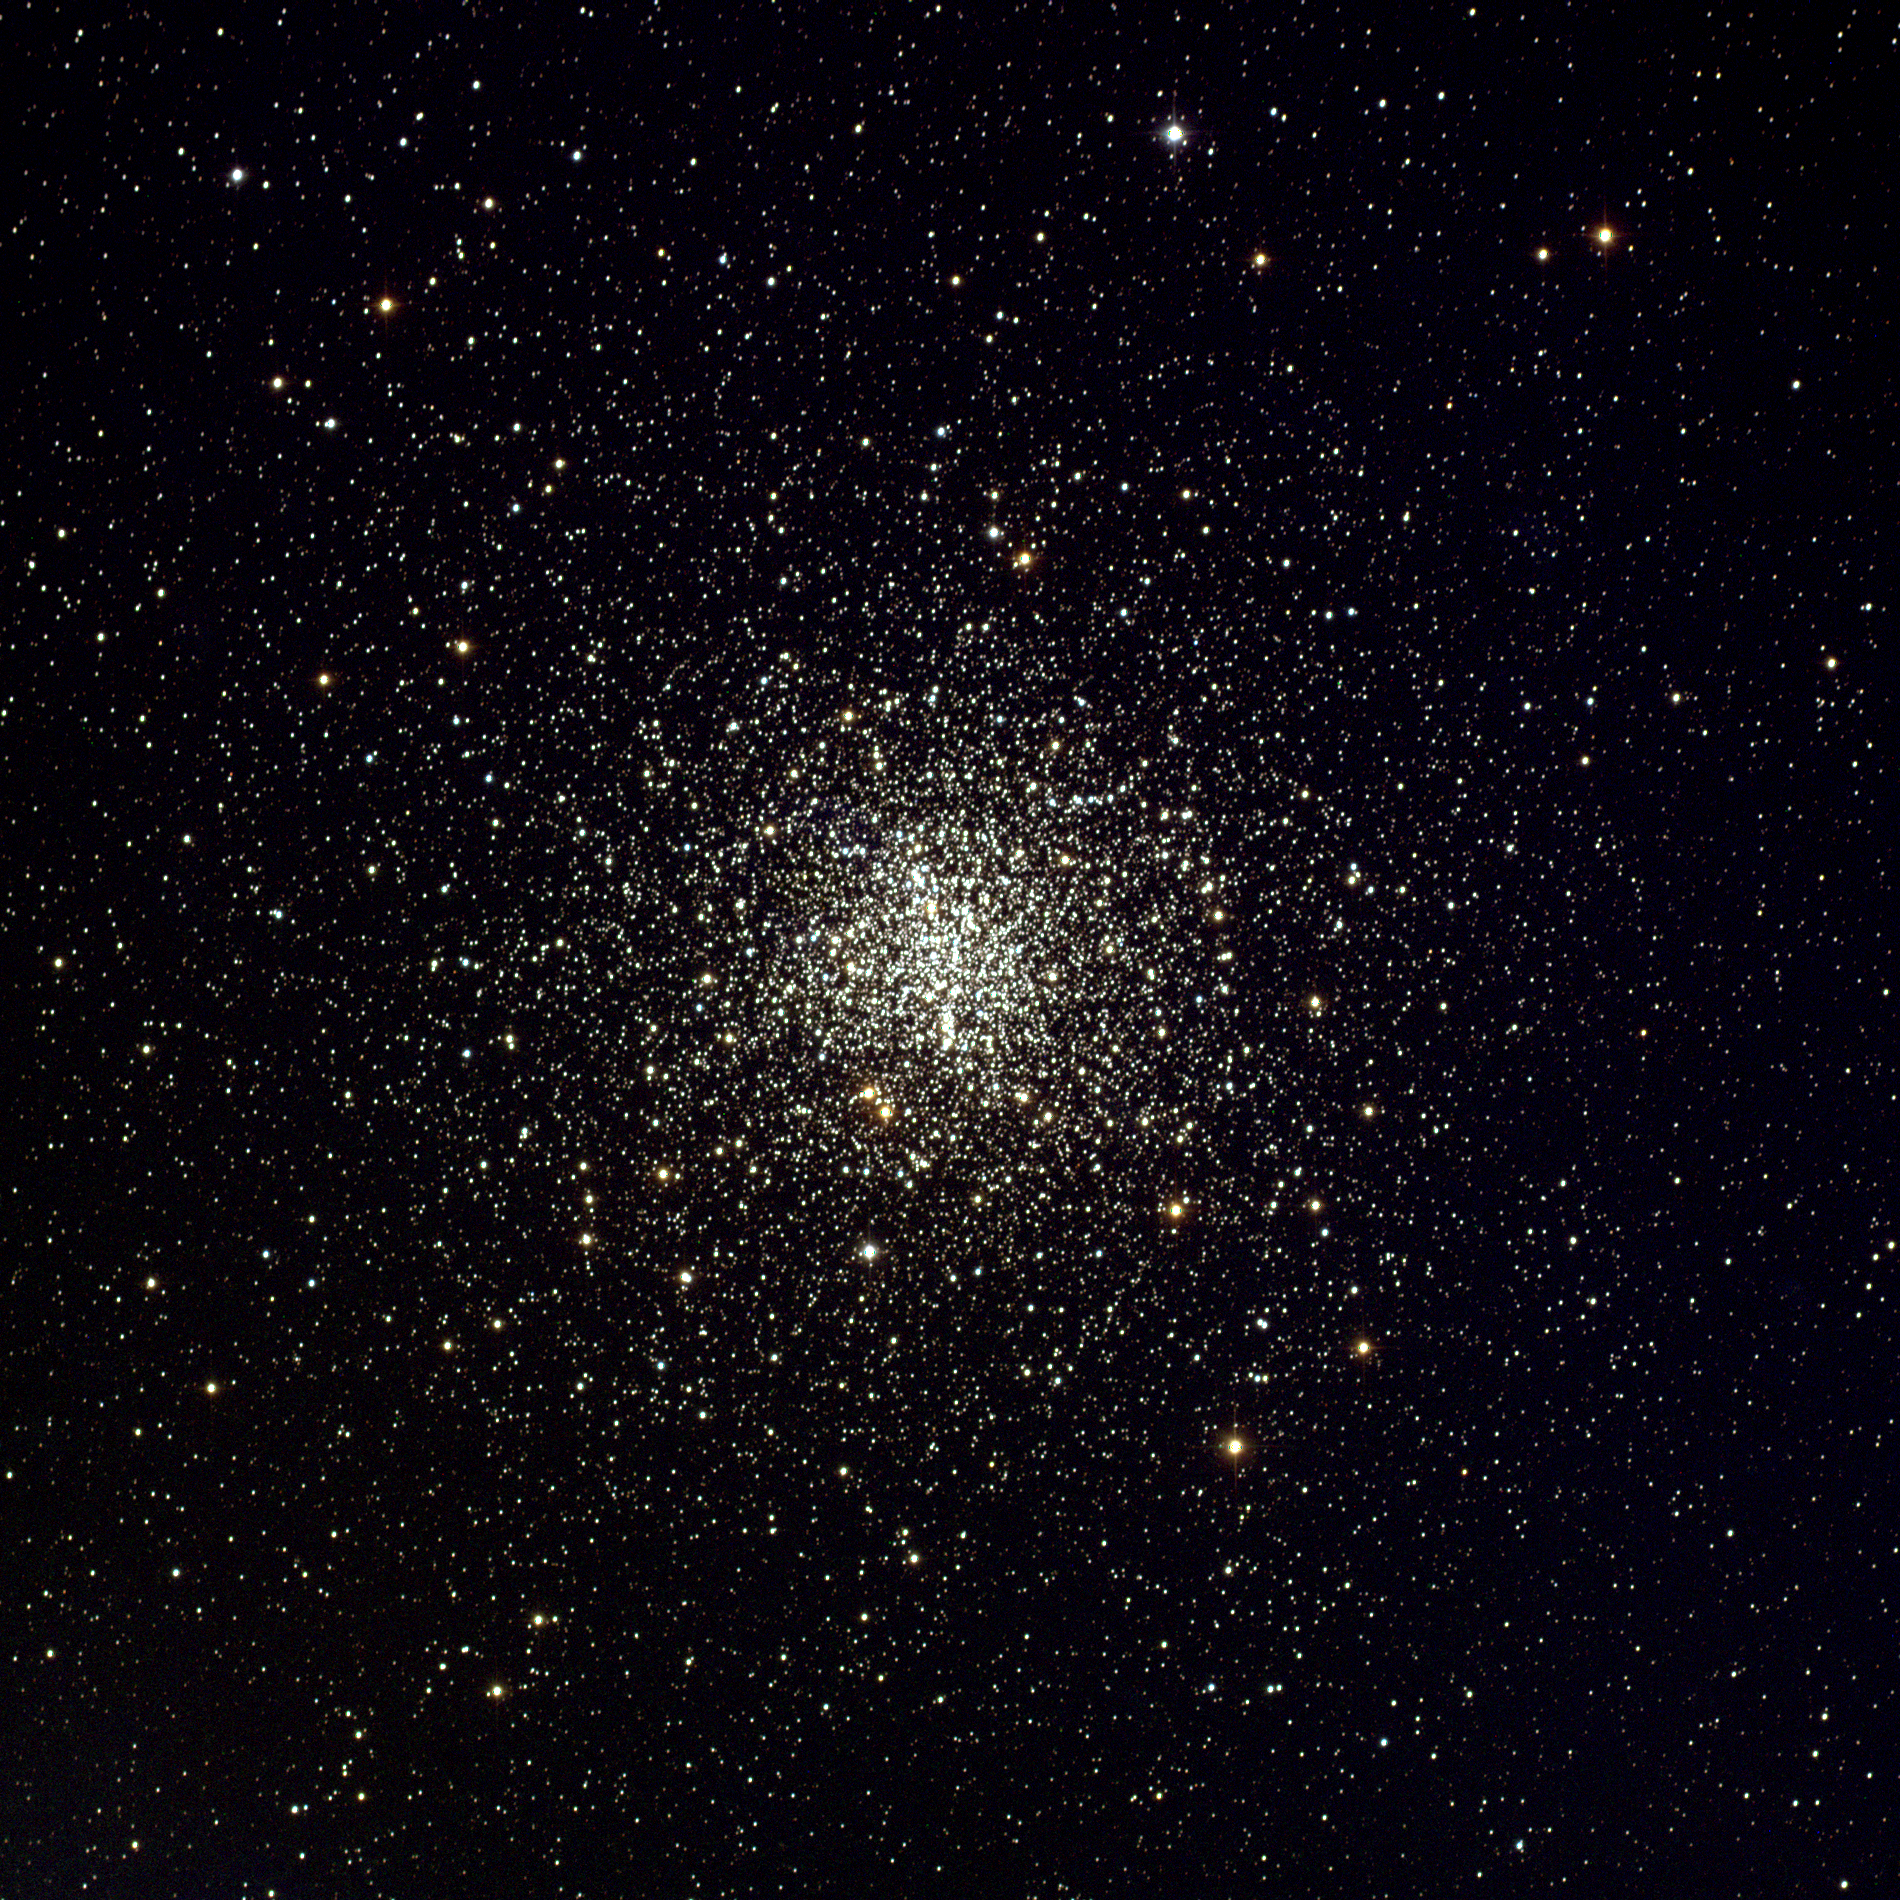

Globular Cluster M4

This panoramic view of the globular cluster M4 was captured by The Kitt Peak National Observatory's 0.9-meter telescope in March 1995.

The cluster hosts some highly interesting white dwarfs that can be used to age-date the Universe.

Credit: NOAO/AURA/NSF